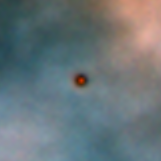

Protoplanetary disc in the Orion Nebula

Disks around young stars (also known as circumstellar or protoplanetary disks) are thought to be made up of 99% gas and 1% dust. Even that small amount of dust is enough to make the disks opaque and dark at visible wavelengths. The dark disk is seen in this image because they are silhouetted against the bright backdrop of the hot gas of the Orion nebula.

Credit: Mark McCaughrean (Max-Planck-Institute for Astronomy), C. Robert O'Dell (Rice University), and NASA/ESA